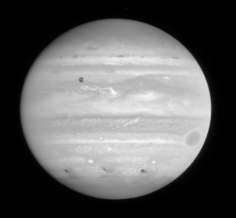

Jupiter Comet Impact

Three impact sites appear as dark smudges lined up along Jupiter's southern hemisphere, after the collision of comet P/Shoemaker-Levy 9.

Credit: NASA & ESA